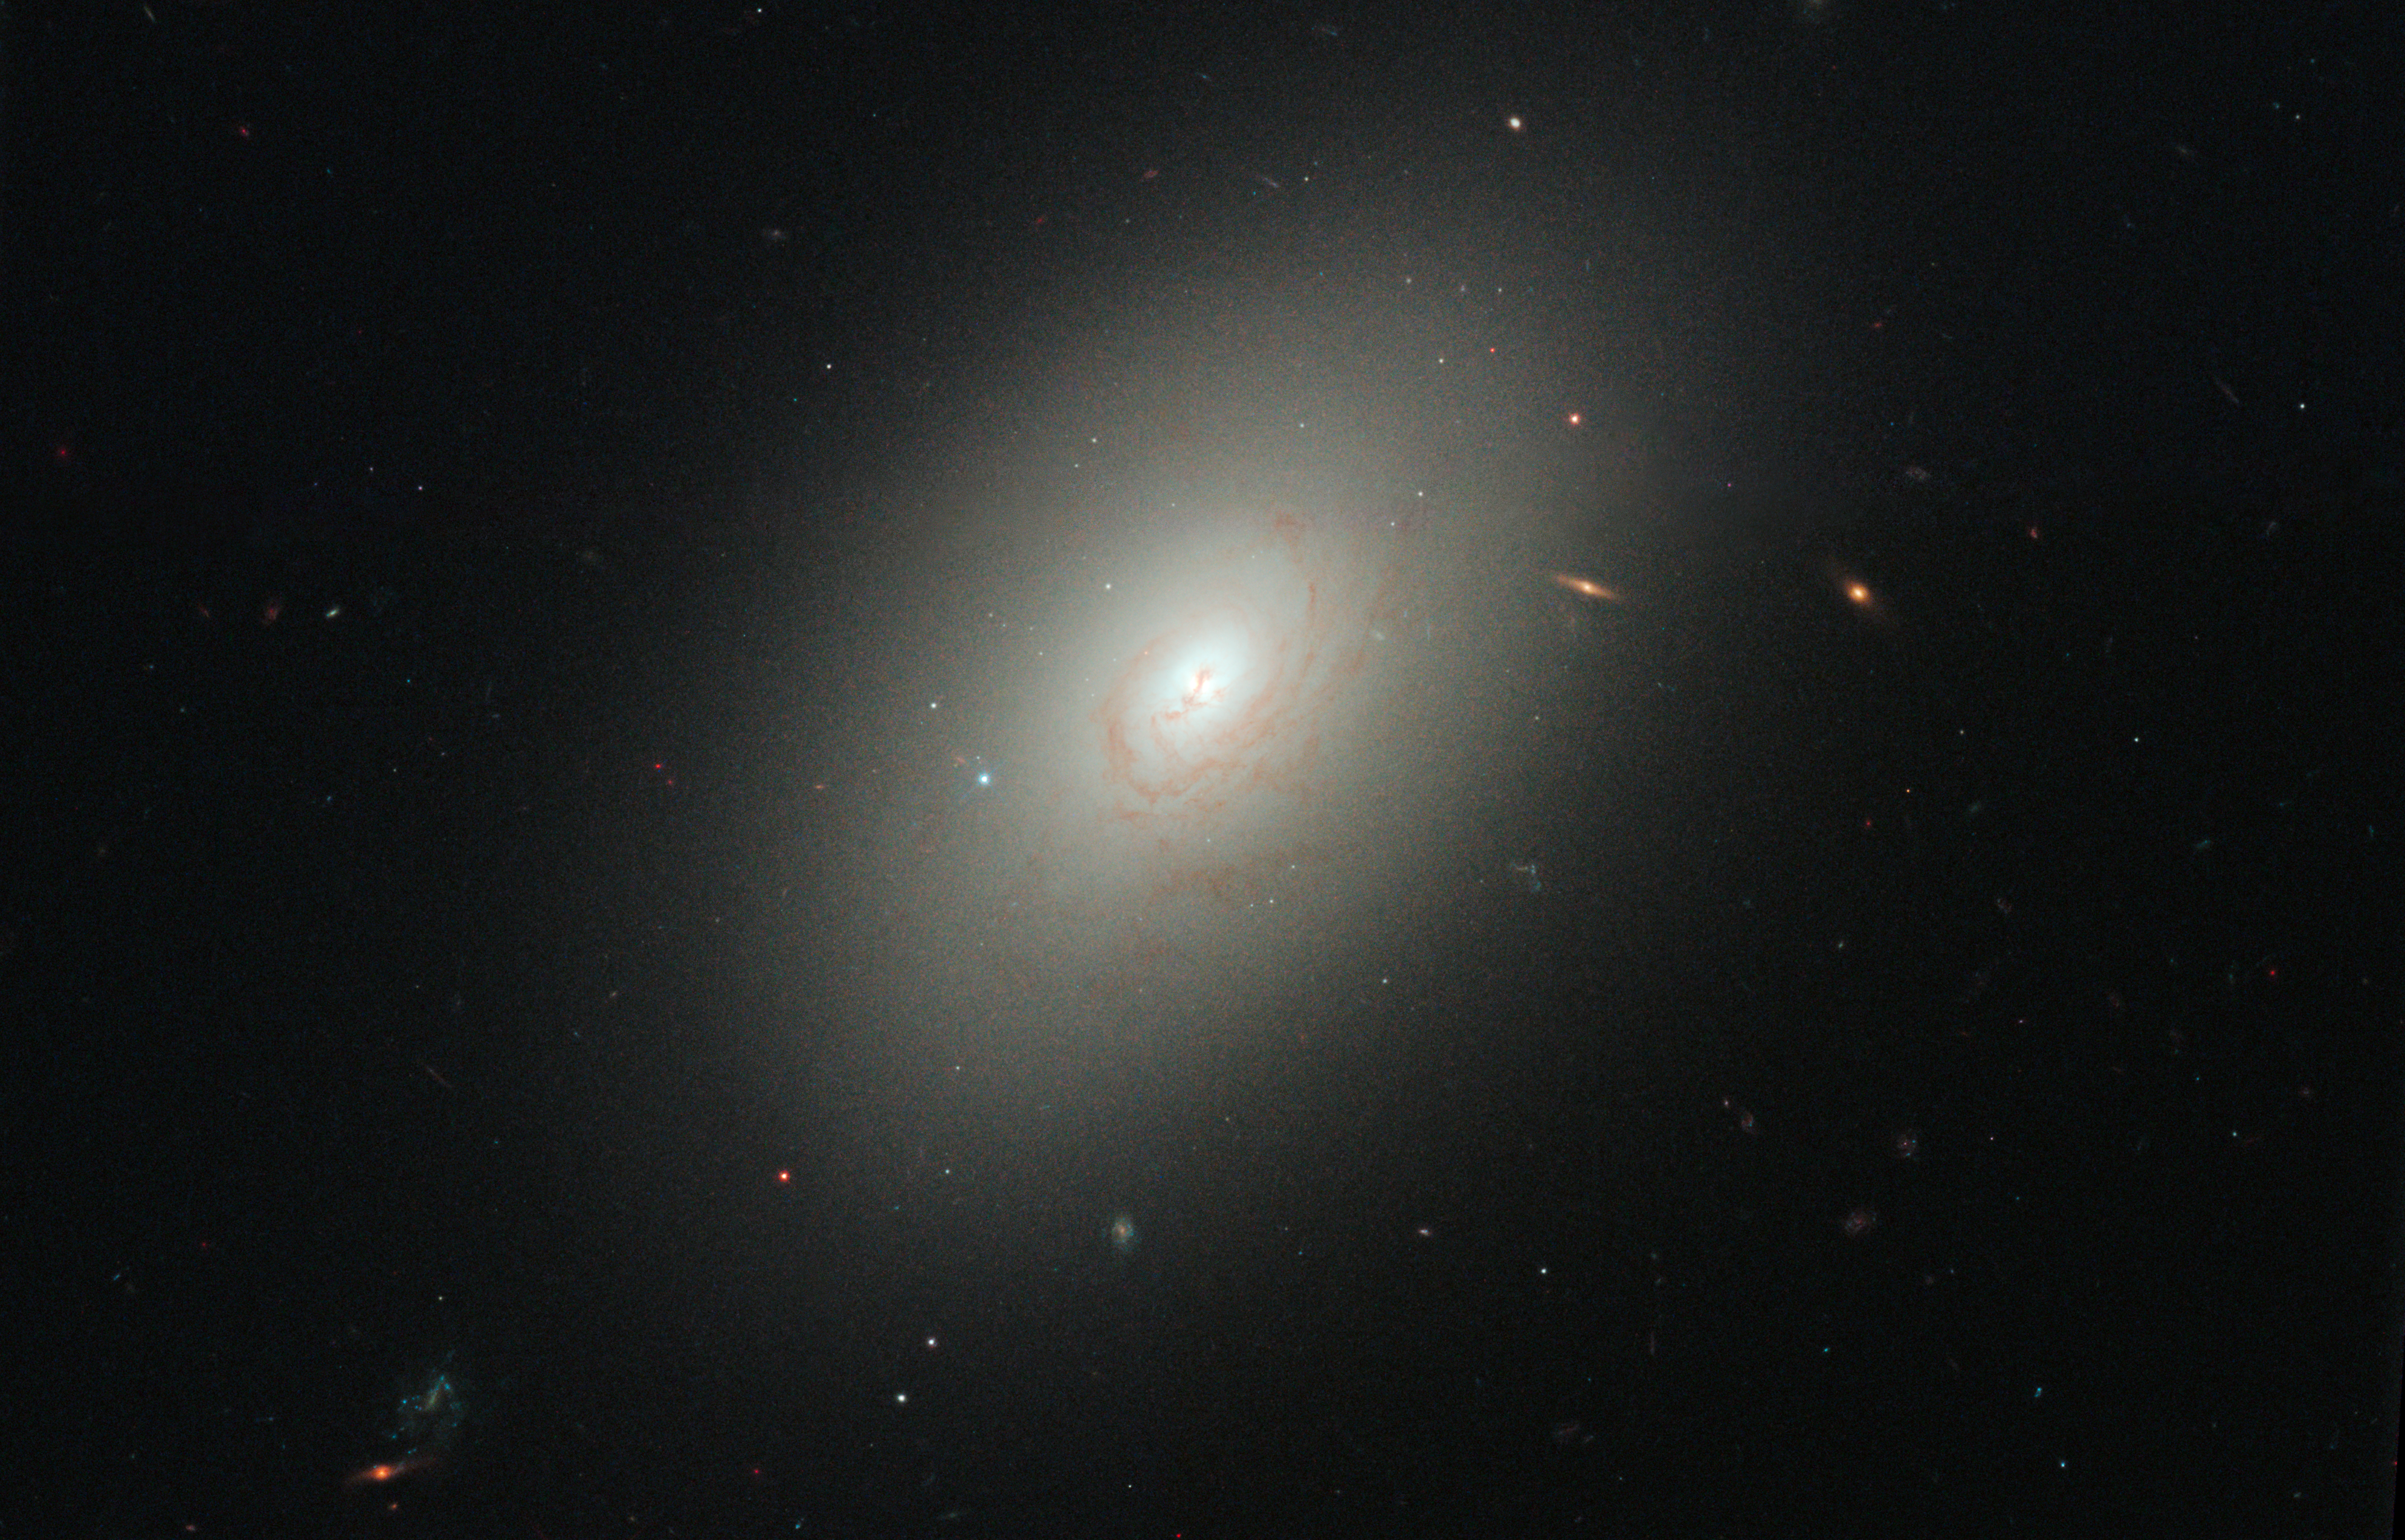

Elliptical galaxy NGC 4150

Elliptical galaxy NGC 4150.

Credit: NASA, ESA, R.M. Crockett (University of Oxford, U.K.), S. Kaviraj (Imperial College London and University of Oxford, U.K.), J. Silk (University of Oxford), M. Mutchler (Space Telescope Science Institute, Baltimore, USA), R. O'Connell (University of Virginia, Charlottesville, USA), and the WFC3 Scientific Oversight Committee